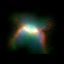

SMP 16 in the Large Magellanic Cloud

In the pictures of the planetary nebulae, colour corresponds to temperature. Blue represents hotter regions of the nebulae and red, cooler. Scientists are probing these illuminated stellar relics in our neighboring galaxy because they are at relatively the same distance - about 168, 000 light-years -- from Earth. Knowing the distance to these objects allows scientists to compare their shapes and sizes, and precisely determine the brightness of their central stars. For this reason, even though these glowing remains of dying stars are about 50 times farther away than the stunning planetary nebulae photographed in the Milky Way, they are of invaluable importance.

Credit: NASA/ESA; L. Stanghellini, R. Shaw, C. Blades, and M. Mutchler, Space Telescope Science Institute, Baltimore, Md.; and B. Balick, University of Washington, Seattle, Wash